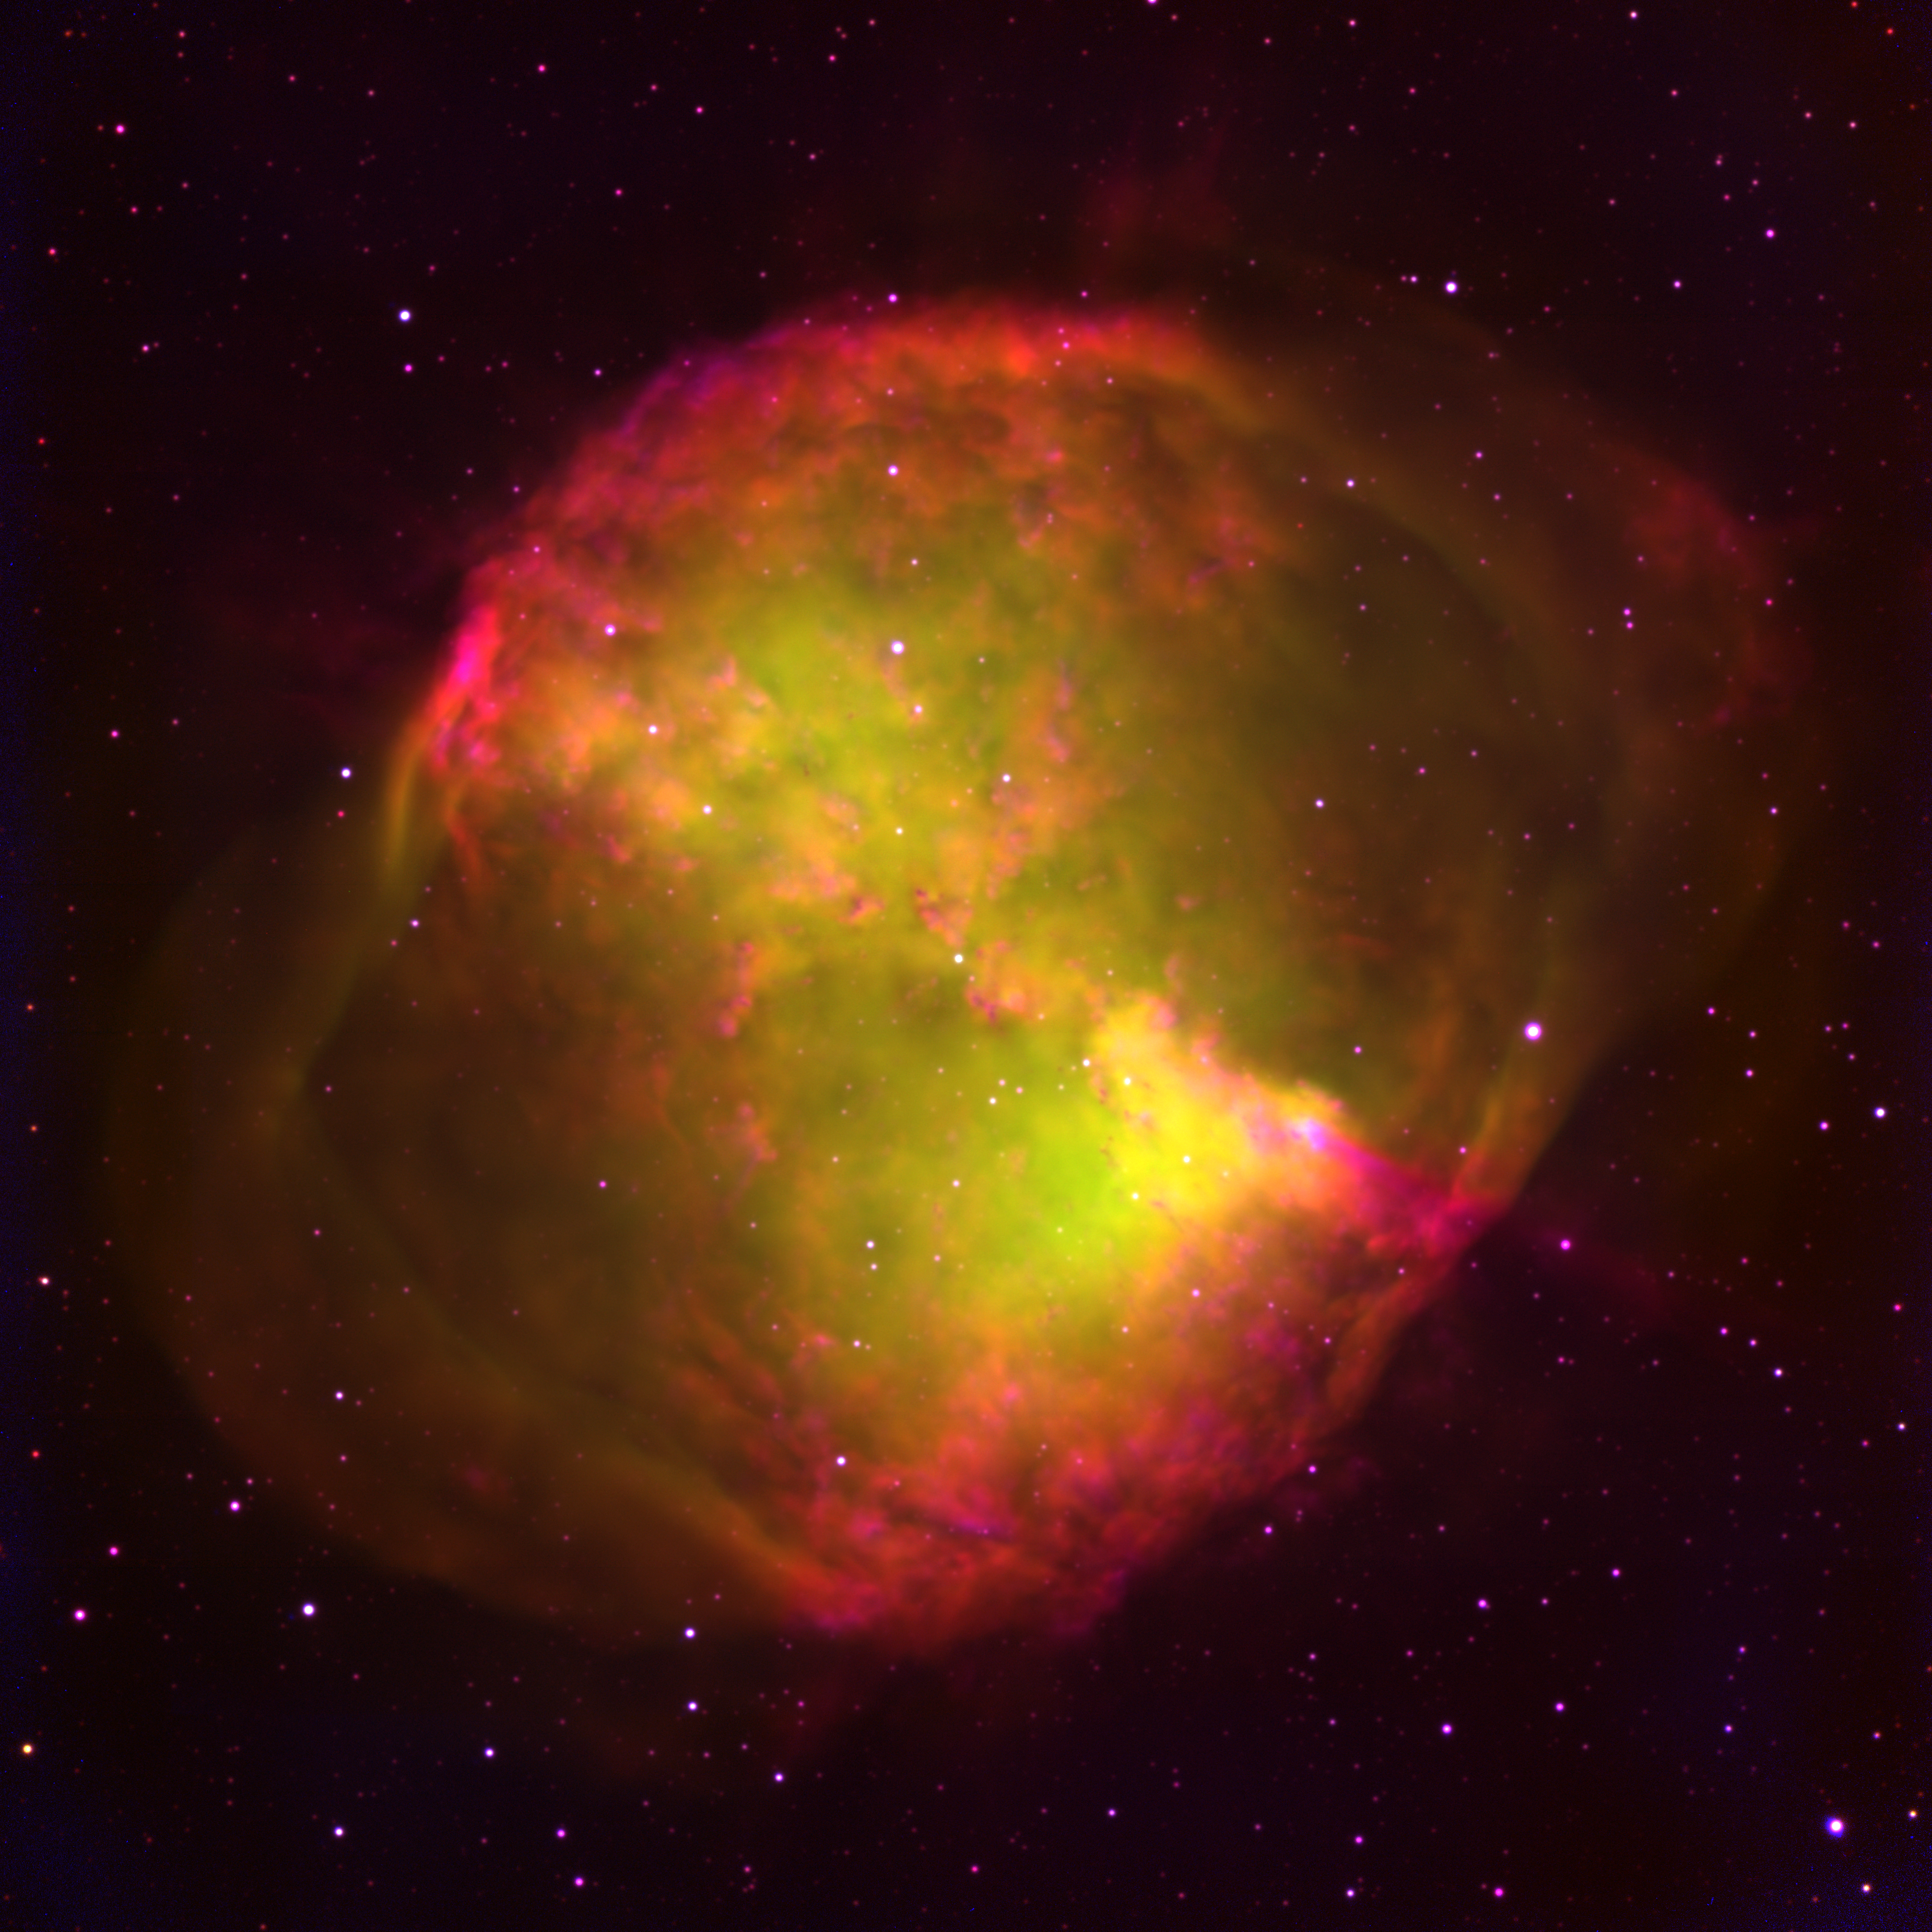

WIYN Emission Line Image of Dumbbell Nebula (ground-based image)

Ground-based image of Dumbbell taken with KPNO WIYN 3.5mtelescope in H-alpha, [O III], and [O I] filters. WIYN Dumbbell Nebula Photo Page

Credit: G. Jacoby, WIYN/NOAO/NSF